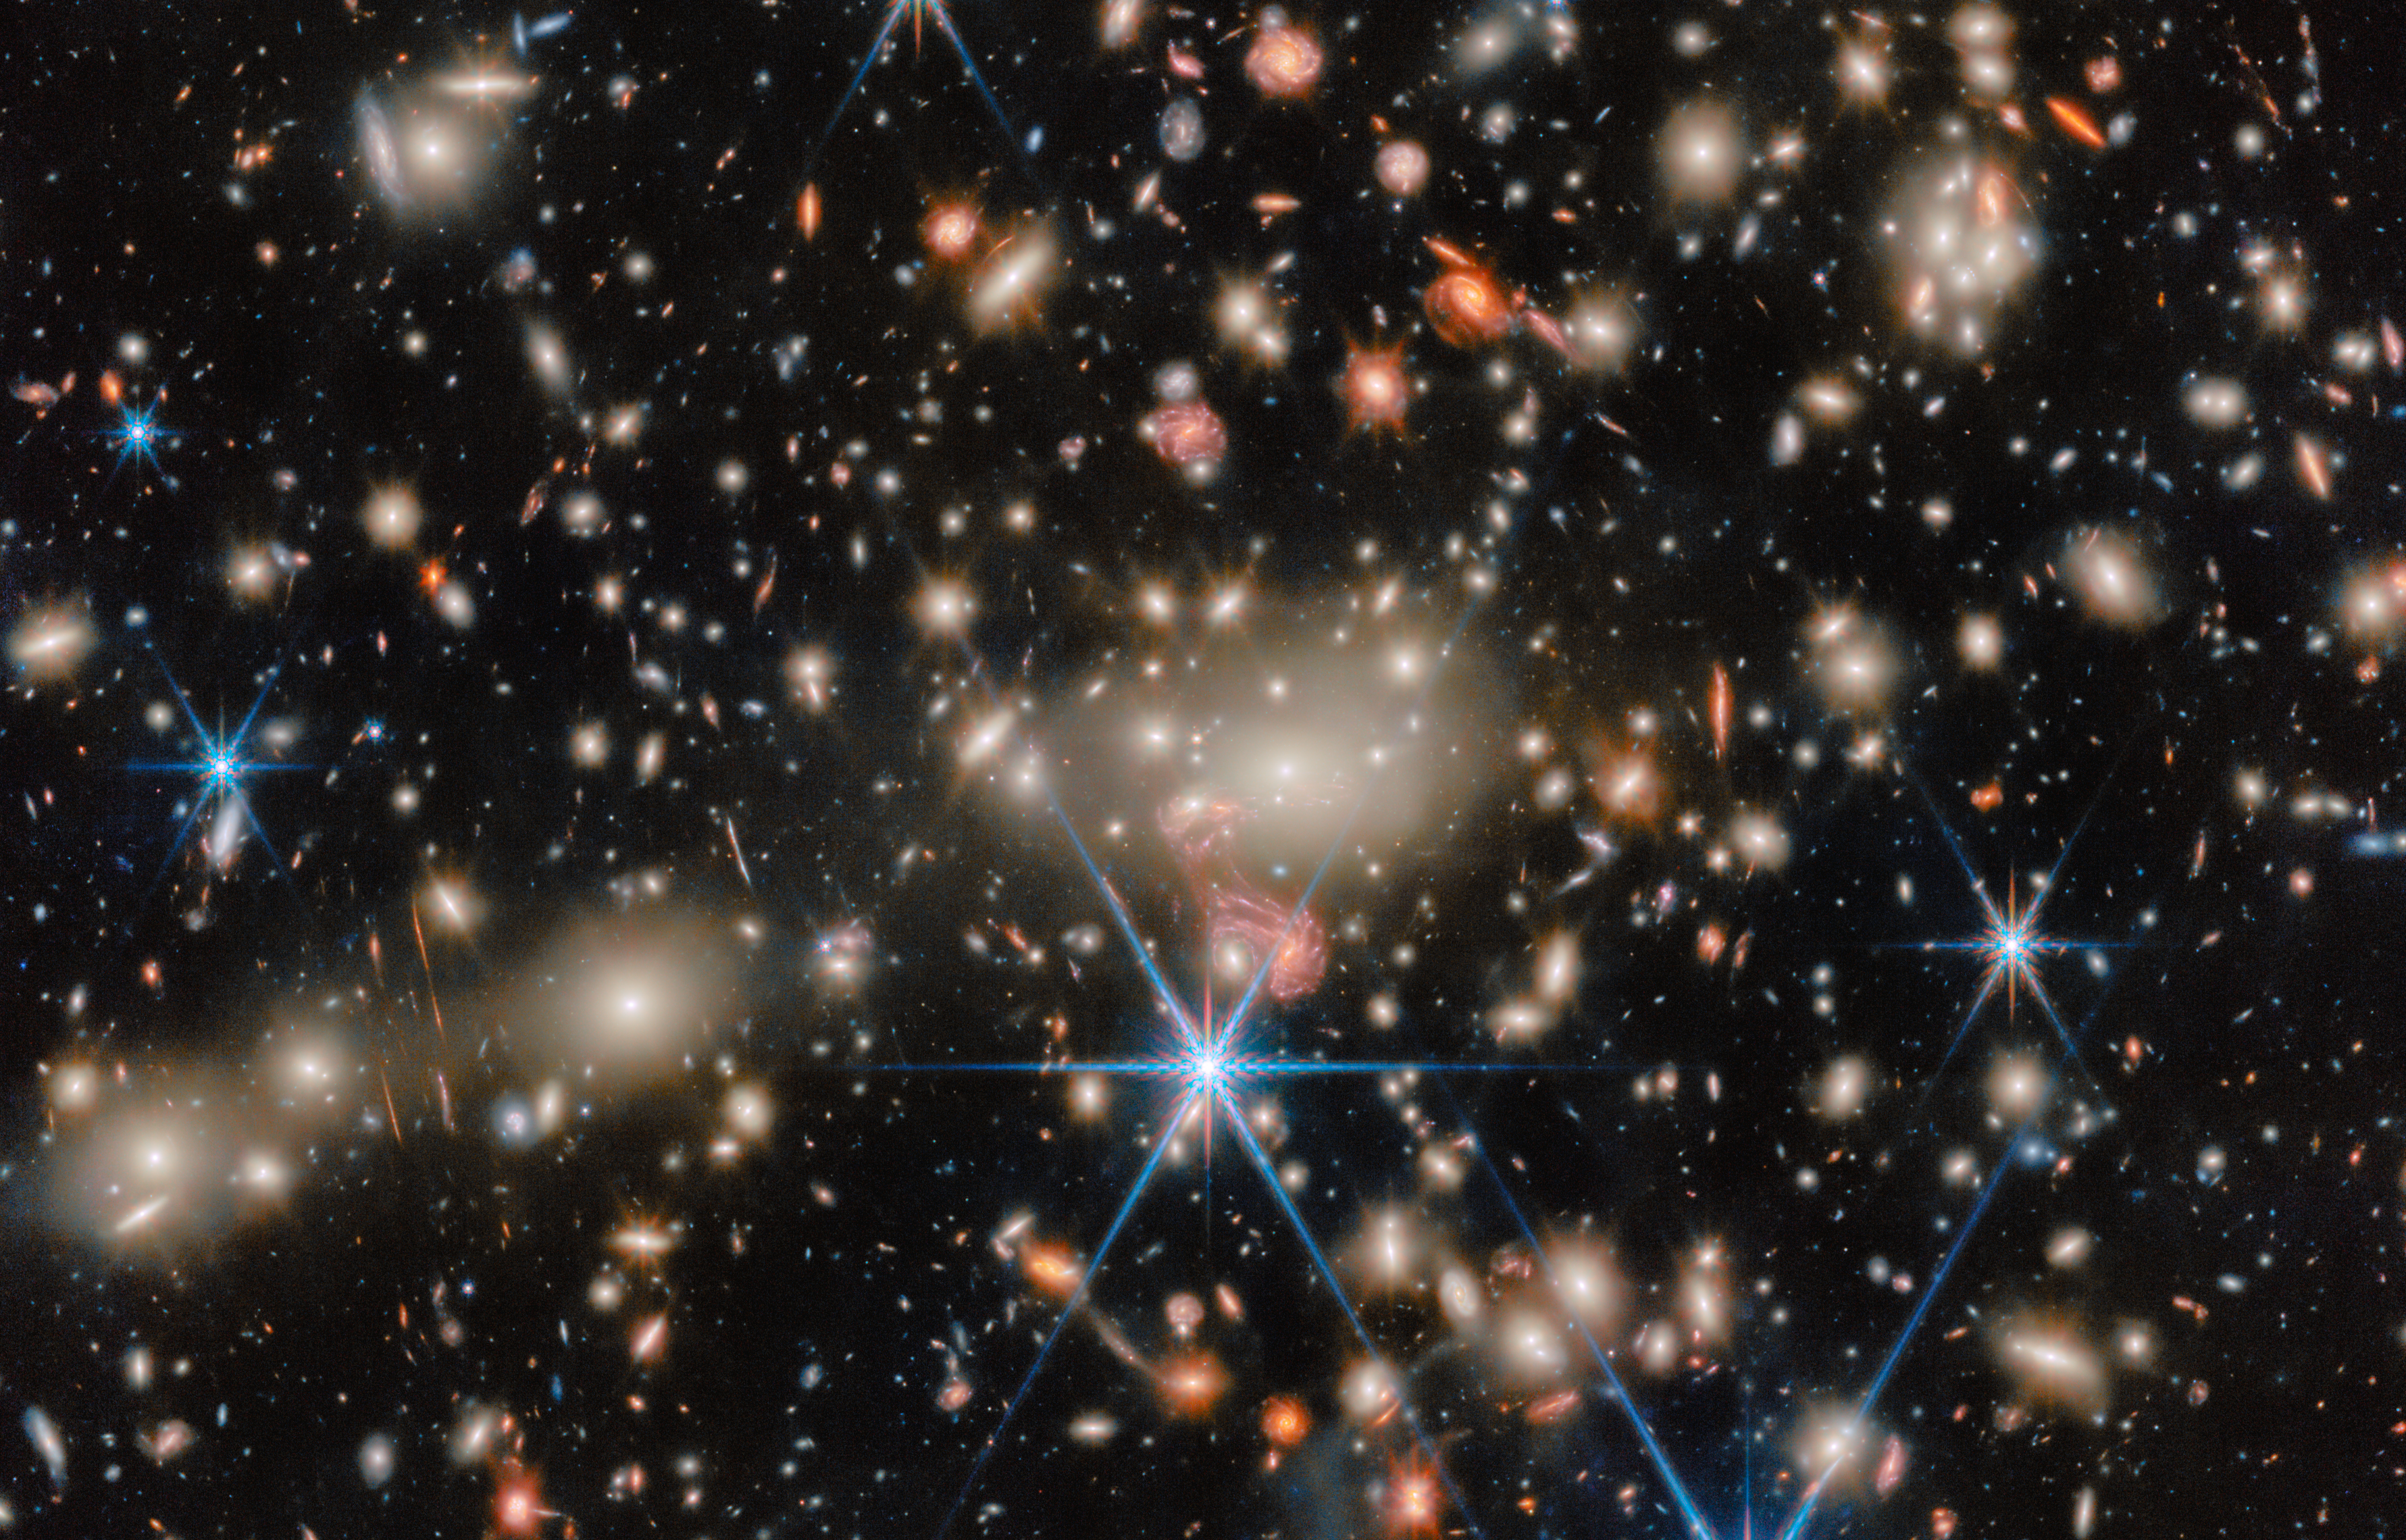

Ready for its closeup: MACS J1149.5+2223 (crop)

This NASA/ESA/CSA James Webb Space Telescope Picture of the Month brings us a scene from the distant Universe. Pictured here is the galaxy cluster MACS J1149.5+2223, or MACS J1149 for short, which is located about 5 billion light-years away in the constellation Leo.

Galaxy clusters are the largest structures in the Universe that are held together by gravity. Astronomers have confirmed more than 300 galaxies belonging to the MACS J1149 cluster, and they’ve identified several hundred more possible members. This image zooms in on the cluster’s centre of activity, where a huddle of ghostly elliptical galaxies rules over the cluster with their immense gravity.

The crushing gravity of this cluster does more than just hold all the galaxies together as they drift through space. As light from galaxies located behind the cluster makes its way toward our telescope, journeying for billions of years, its path through spacetime is bent by the mass of the intervening galaxies.

This phenomenon is called gravitational lensing, and the result is evident in this image of MACS J1149; scattered across the image are subtle and not-so-subtle examples of gravitational lensing, from galaxies that appear to have been stretched into narrow streaks of light to galaxy images that have morphed into strange shapes.

A fantastic example of gravitational lensing can be seen near the centre of the image, just below the brilliant white galaxies at the heart of the cluster. There, the image of a galaxy with distinct spiral arms has been stretched into something resembling a pink jellyfish. This tangled-looking galaxy is home to what was once the most distant single star ever discovered as well as a supernova whose image appeared four times at once.

MACS J1149 has long received the celebrity treatment from leading telescopes, and for good reason. This cluster was one of six investigated through the NASA/ESA Hubble Space Telescope’s Frontier Fields programme. The Frontier Fields galaxy clusters were selected for the strength of their gravitational lensing, and their ability to warp spacetime has granted researchers a glimpse into the early Universe.

Now, Webb is pushing our knowledge horizon to even earlier times, enabling new discoveries like a feasting supermassive black hole less than 600 million years after the Big Bang. Using Webb’s Near-Infrared Spectrograph (NIRSpec), Near-InfraRed Camera (NIRCam), and Near-InfraRed Imager and Slitless Spectrograph (NIRISS), researchers are revealing never-before-seen details of the lives of early galaxies.

The Webb data used to create this image were collected as part of the CAnadian NIRISS Unbiased Cluster Survey (CANUCS) programme #1208 (PI: C. J. Willott). This programme uses Webb’s sensitive instruments to unveil the evolution of low-mass galaxies in the early Universe, revealing their star formation, dust and chemistry. These data will also help researchers study the epoch of reionisation, when the first stars and galaxies lit up the Universe, map the distribution of mass within galaxy clusters, and understand how star formation can slow to a trickle in a cluster environment.

Credit: ESA/Webb, NASA & CSA, C. Willott (National Research Council Canada), R. Tripodi (INAF - Astronomical Observatory of Rome)